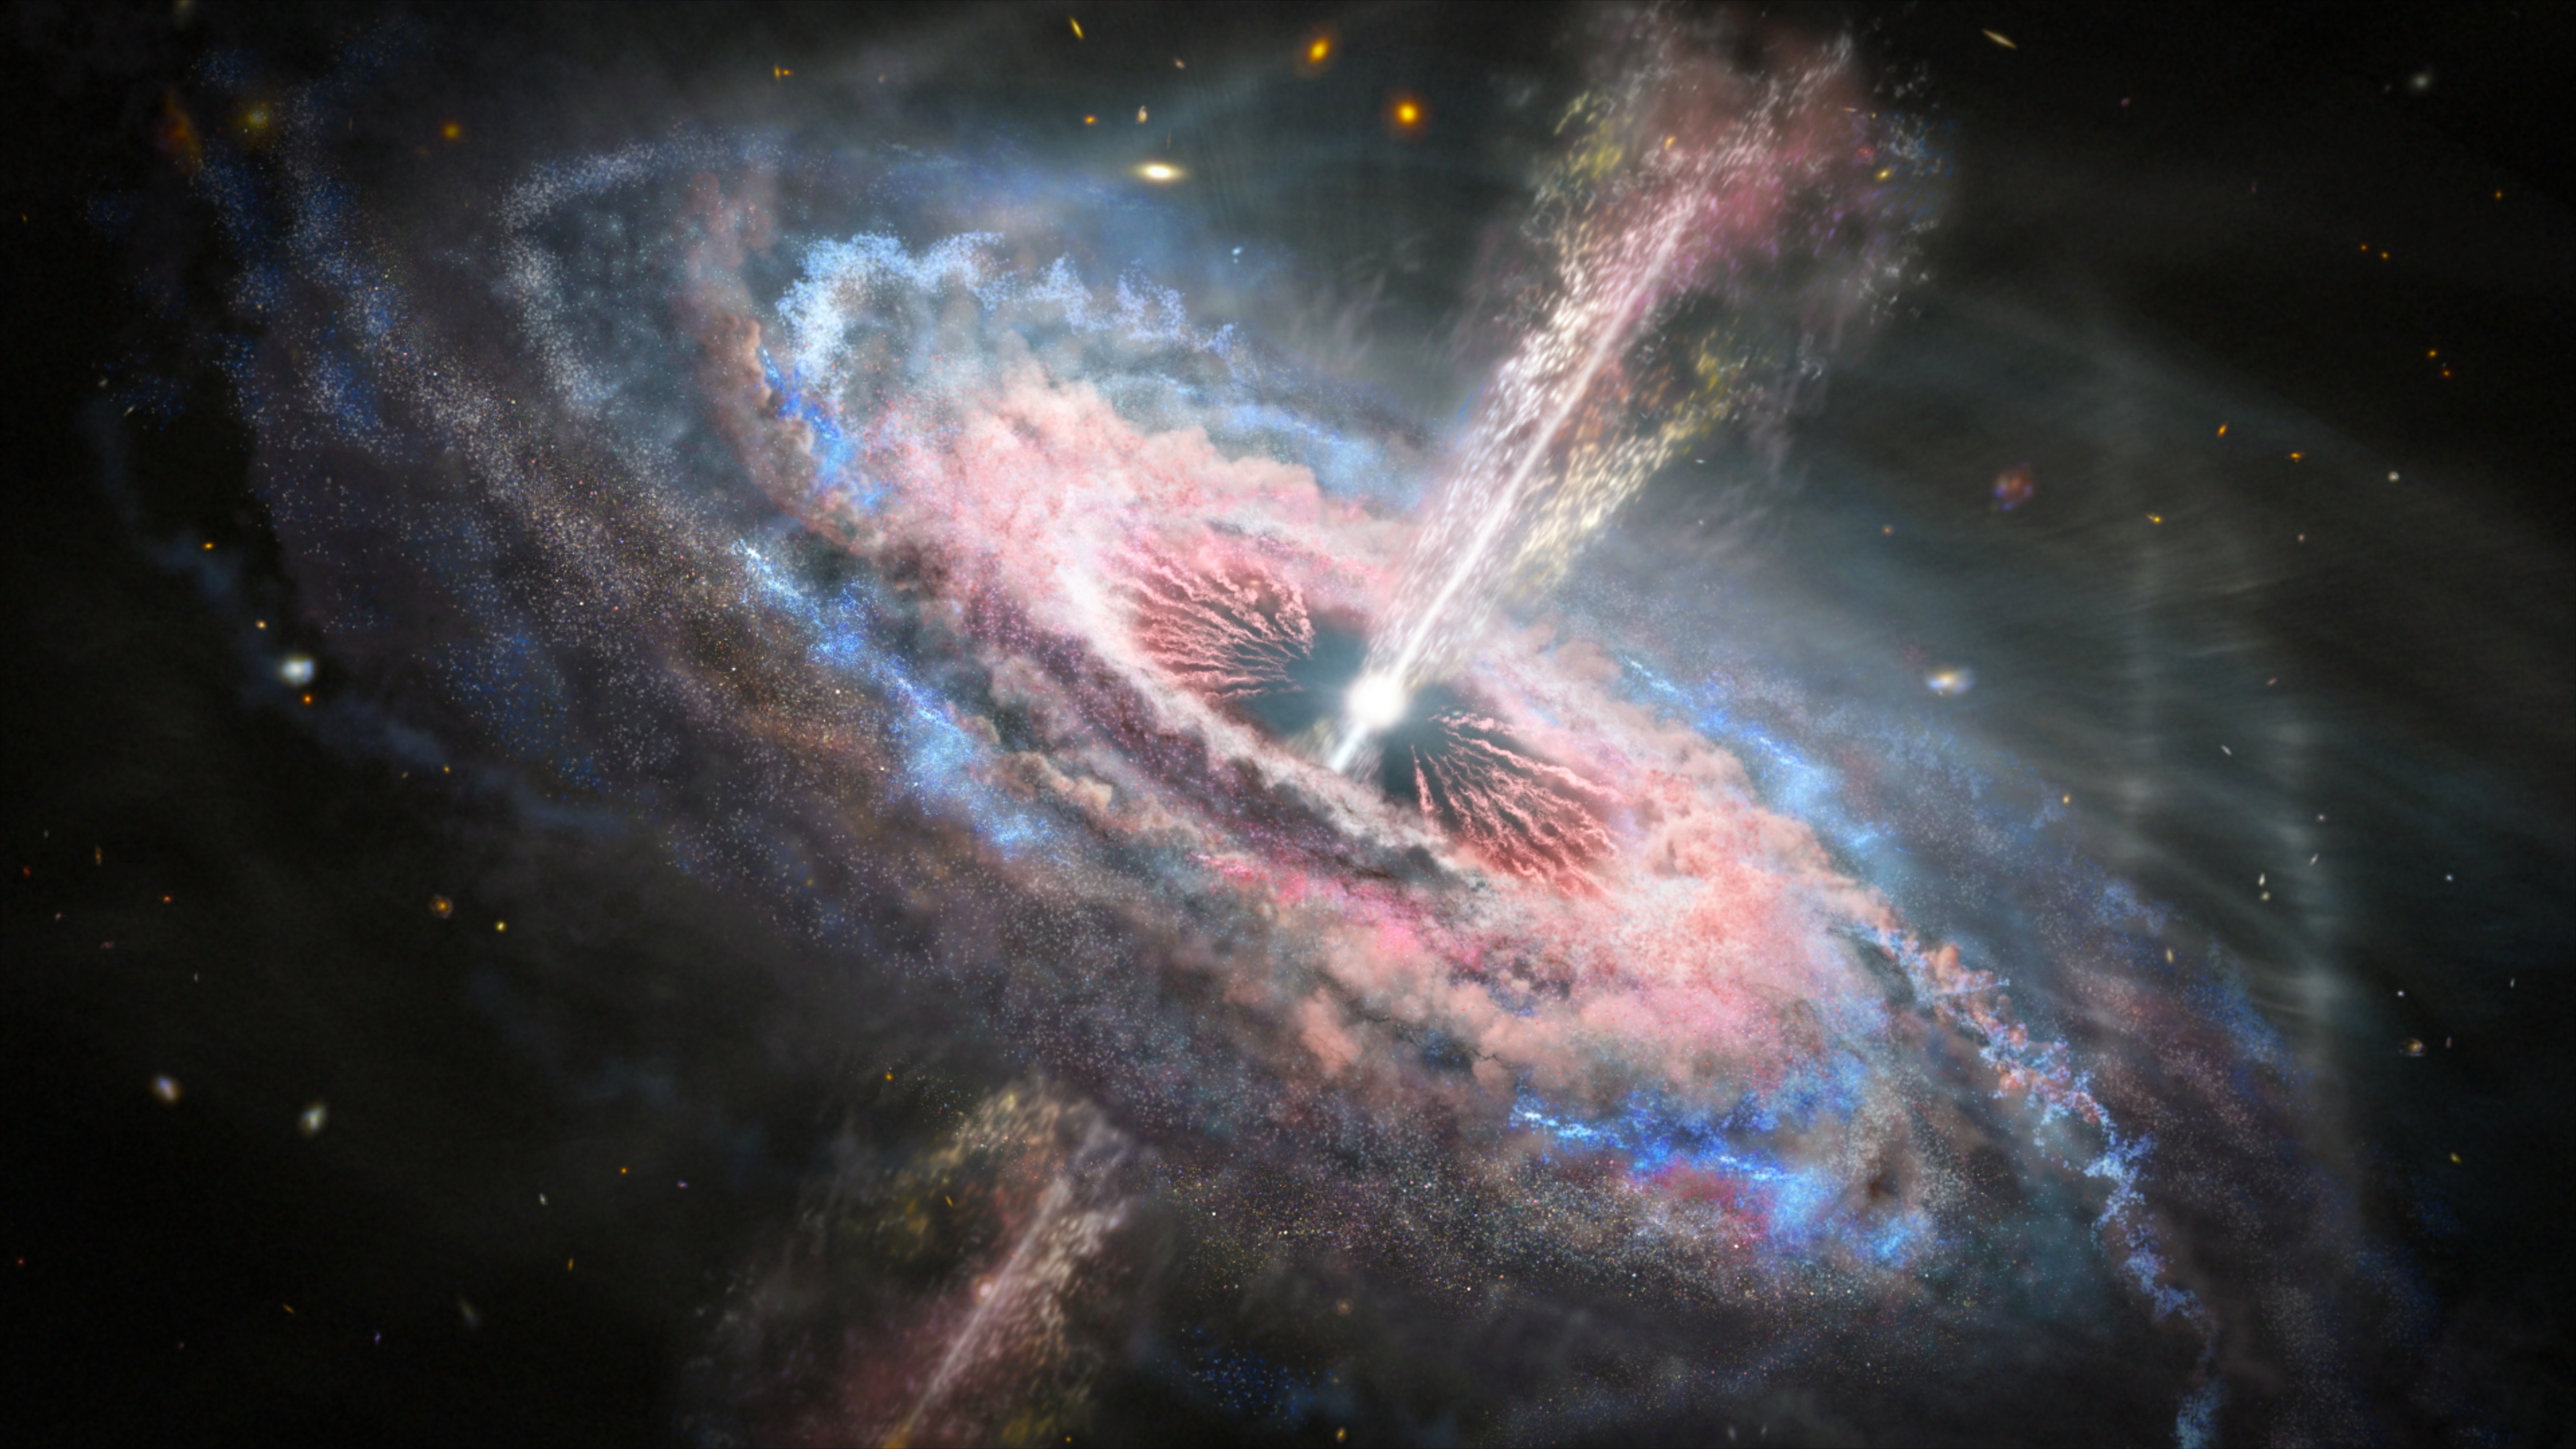

Hubble Probes Quasar Tsunamis Rip Across Galaxies

This is an artist's concept of a distant galaxy with an active quasar at its center. A quasar emits exceptionally large amounts of energy generated by a supermassive black hole fueled by infalling matter. Using the unique capabilities of the NASA/ESA Hubble Space Telescope, astronomers have discovered that blistering radiation pressure from the vicinity of the black hole pushes material away from the galaxy's center at a fraction of the speed of light. The "quasar winds" are propelling hundreds of solar masses of material each year. This affects the entire galaxy as the material forces itself into surrounding gas and dust.

Credit: NASA, ESA, and J. Olmsted (STScI)